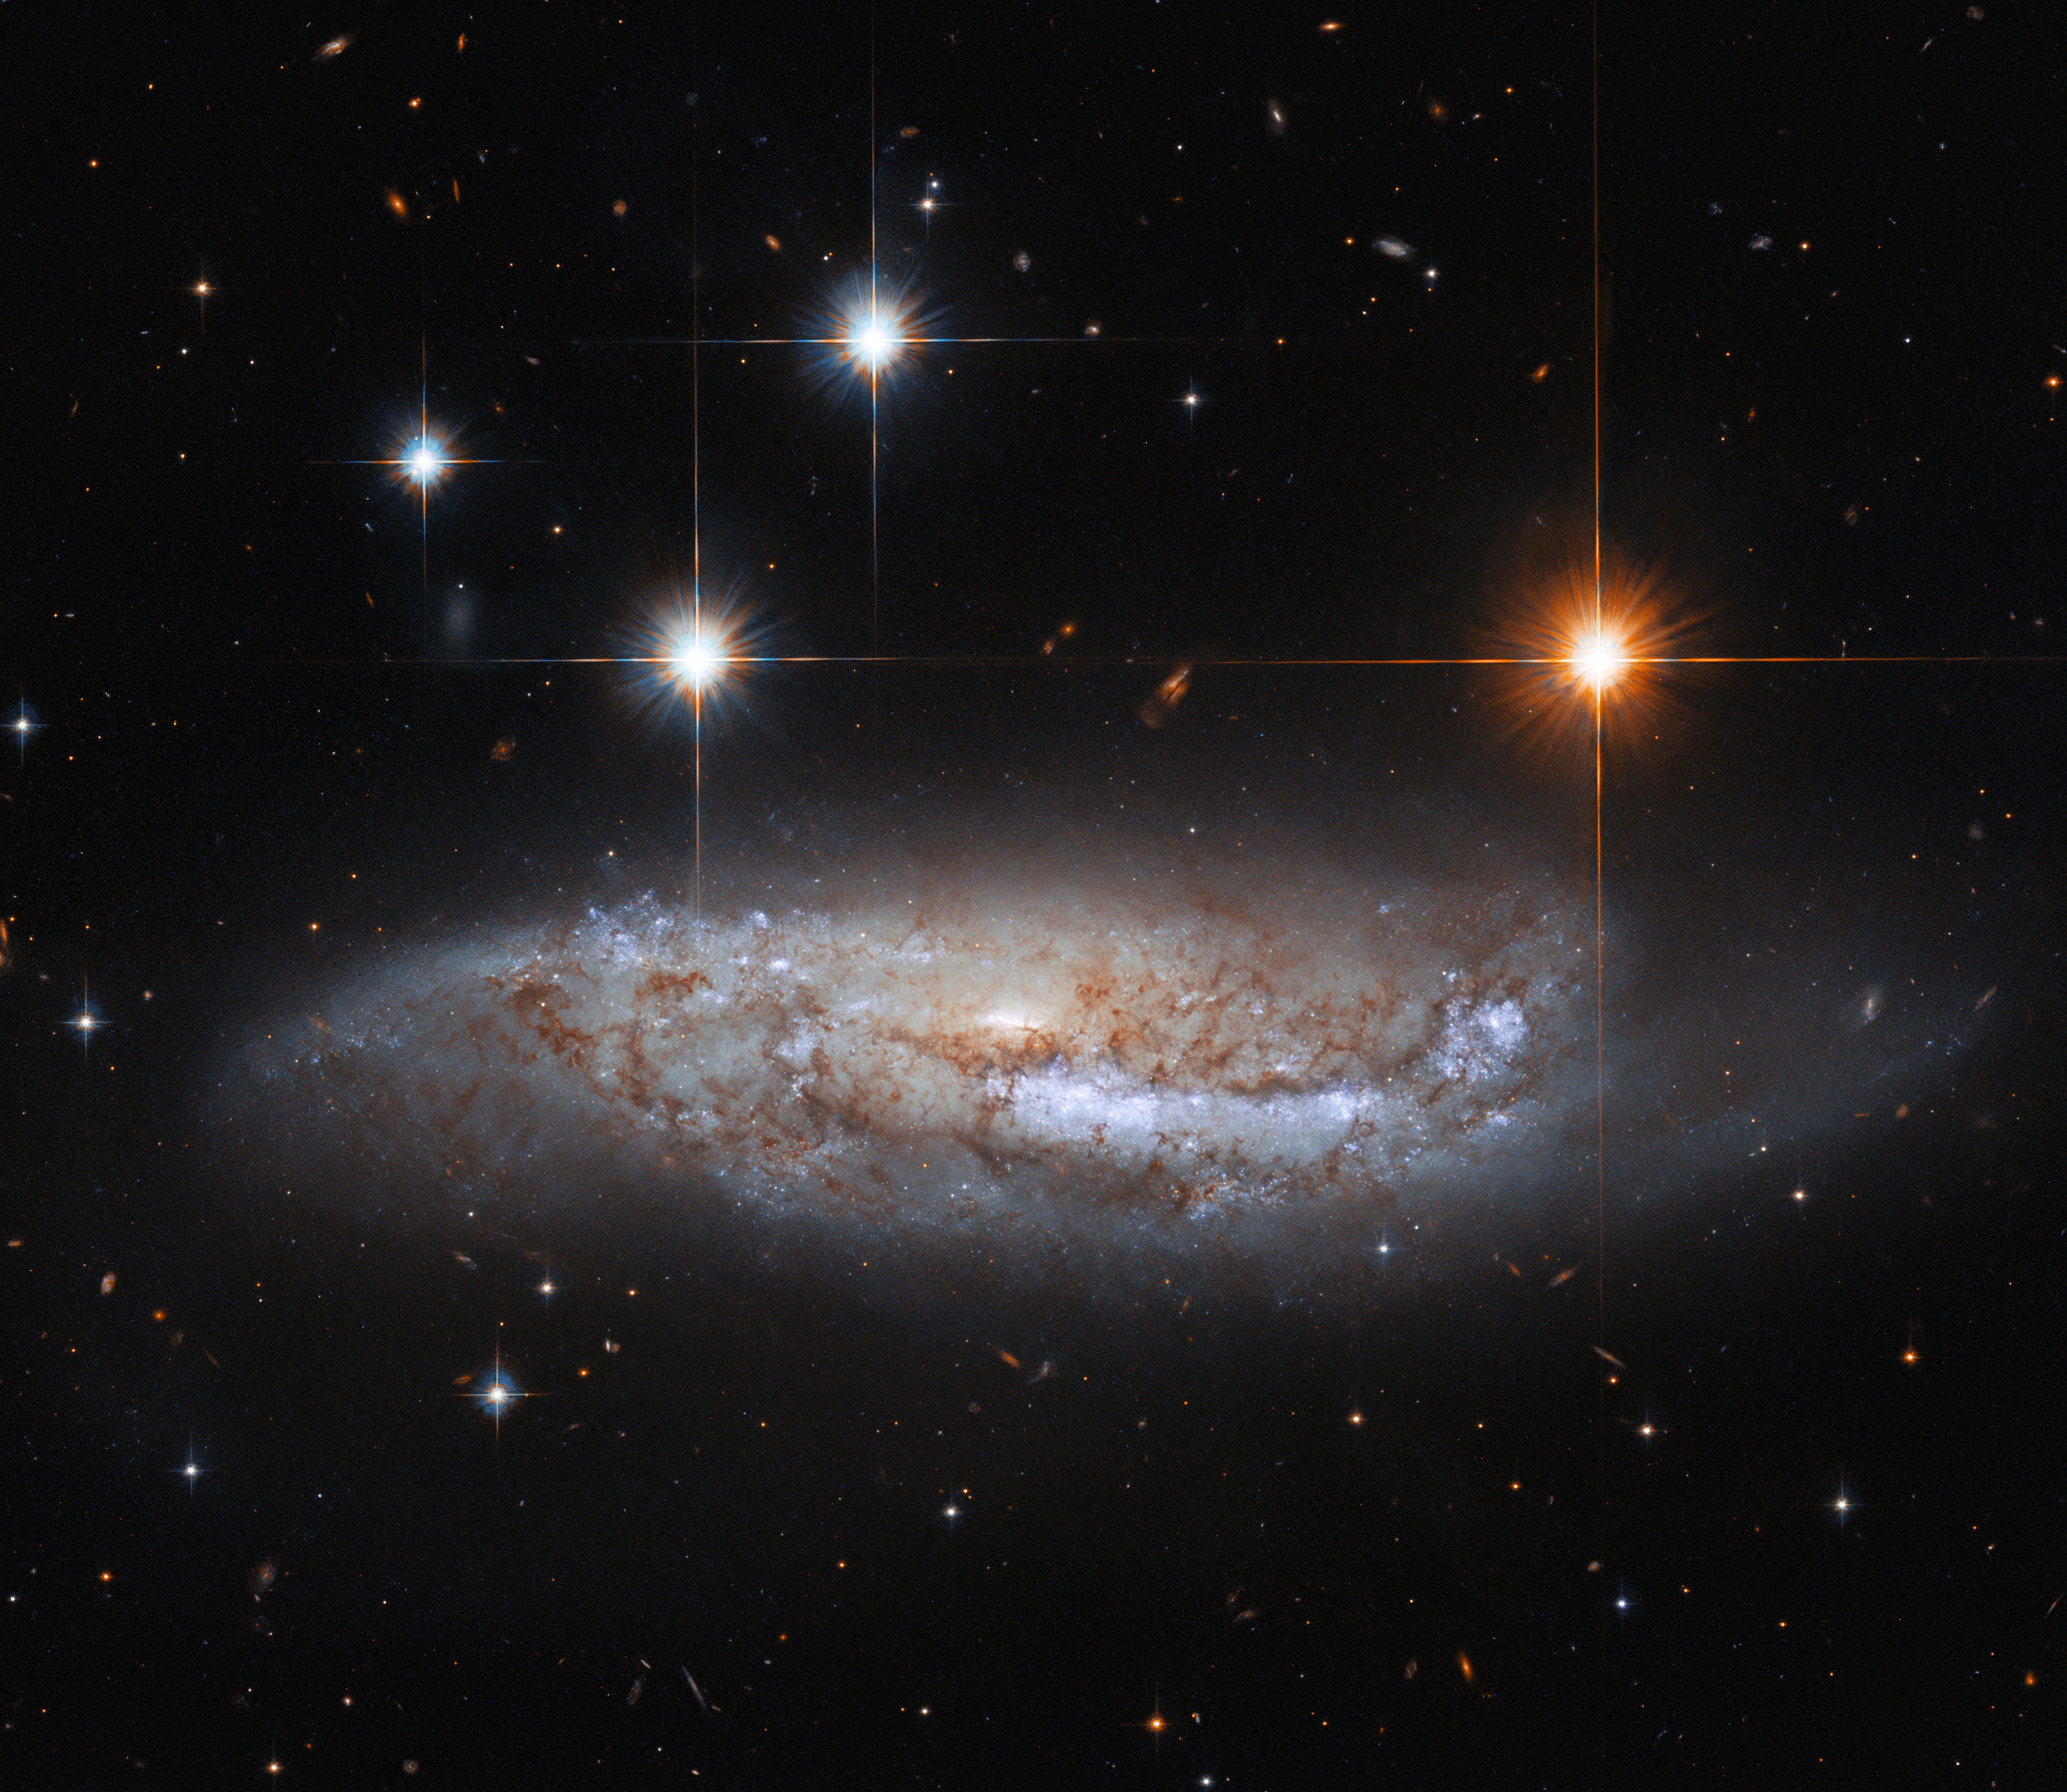

Hubble Gazes Sidelong at NGC 3568

In this image, the NASA/ESA Hubble Space Telescope captures a side-on view of NGC 3568, a barred spiral galaxy roughly 57 million light-years from the Milky Way in the constellation Centaurus. In 2014 the light from a supernova explosion in NGC 3568 reached Earth — a sudden flare of light caused by the titanic explosion accompanying the death of a massive star. Whilst most astronomical discoveries are the work of teams of professional astronomers, this supernova was discovered by amateur astronomers from the Backyard Observatory Supernova Search in New Zealand. Dedicated amateur astronomers often make intriguing discoveries — particularly of fleeting astronomical phenomena such as supernovae.

This Hubble observation comes from a hoard of data built up to pave the way for future science with the upcoming NASA/ESA/CSA James Webb Space Telescope. By combining ground-based observations with data from Hubble’s Advanced Camera for Surveys and Wide Field Camera 3, astronomers have built a treasure trove of data on the connections between young stars and the clouds of cold gas in which they form. One of Webb’s key science goals is to explore the life cycle of stars — particularly how and where stars are born. Since Webb observes at infrared wavelengths, it will be able to peer through the clouds of gas and dust in stellar nurseries and observe the fledgling stars within. Webb’s superb sensitivity will even allow astronomers to directly investigate faint protostellar cores — the earliest stages of star birth.

Credit: ESA/Hubble & NASA, M. Sun